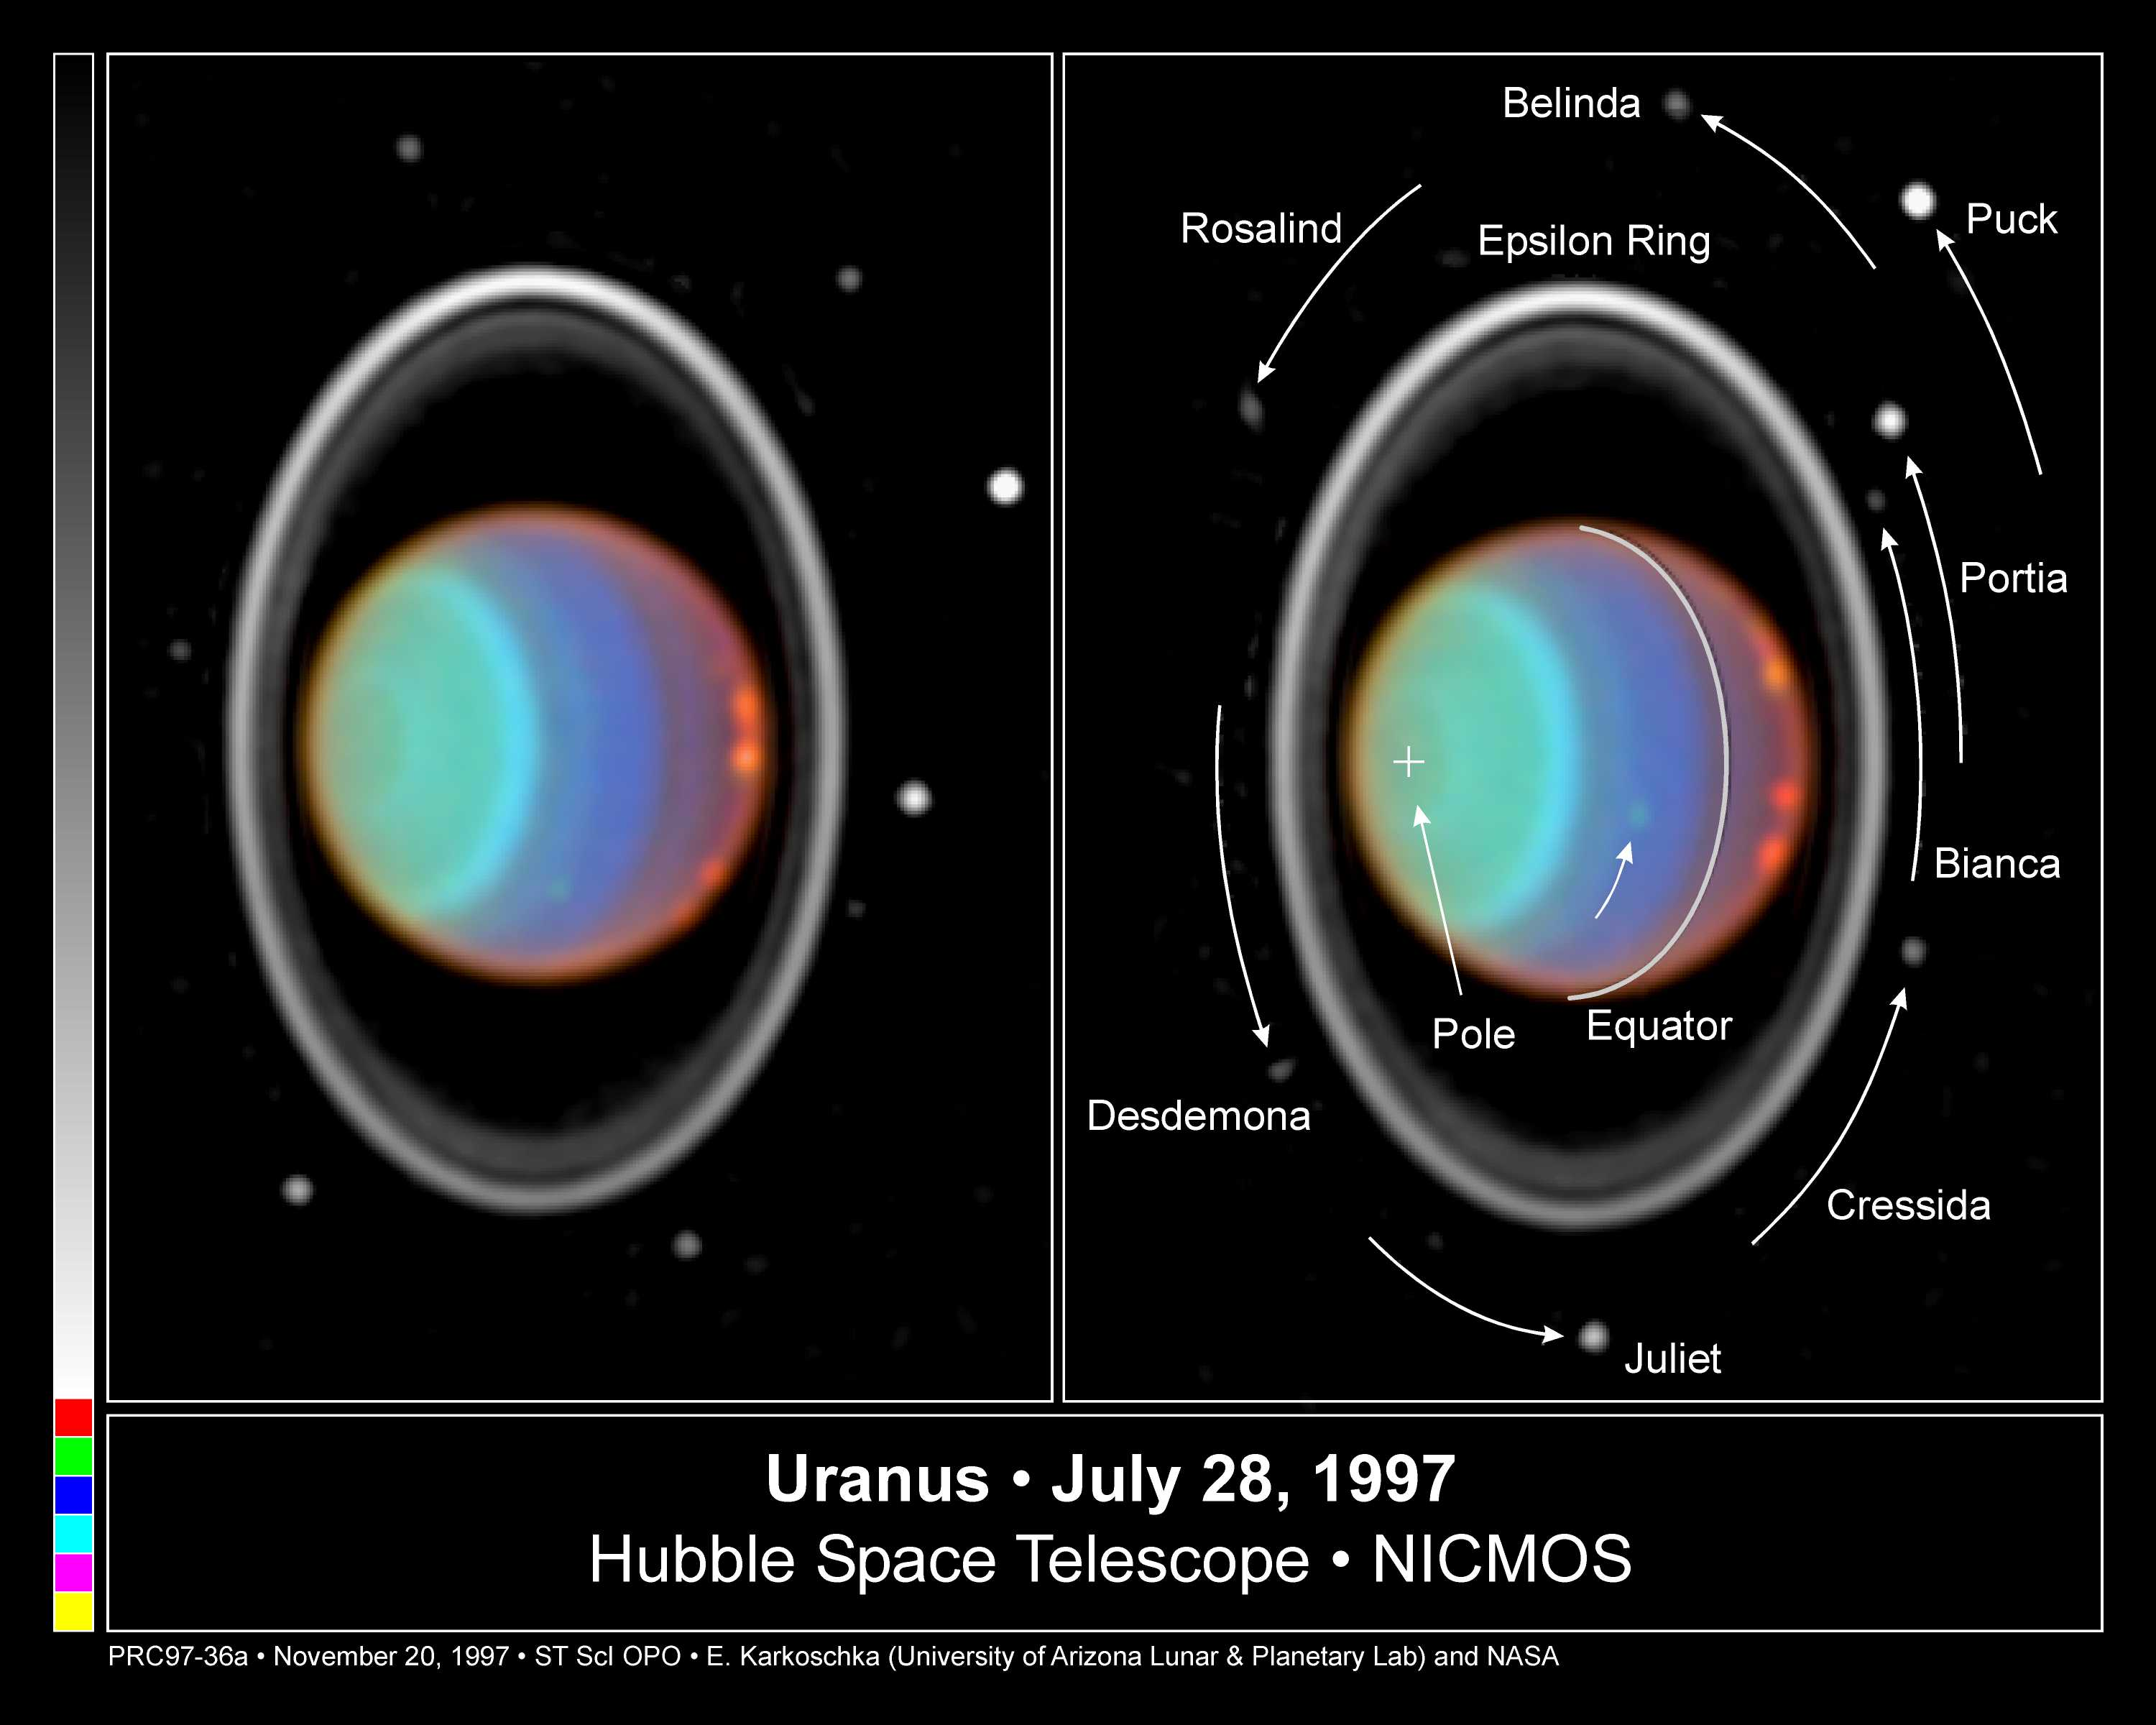

Hubble Tracks Clouds on Uranus

Taking its first peek at Uranus, NASA/ESA Hubble Space Telescope's Near Infrared Camera and Multi-Object Spectrometer (NICMOS) has detected six distinct clouds in images taken July 28, 1997.

Credit: Erich Karkoschka (University of Arizona), and NASA/ESA